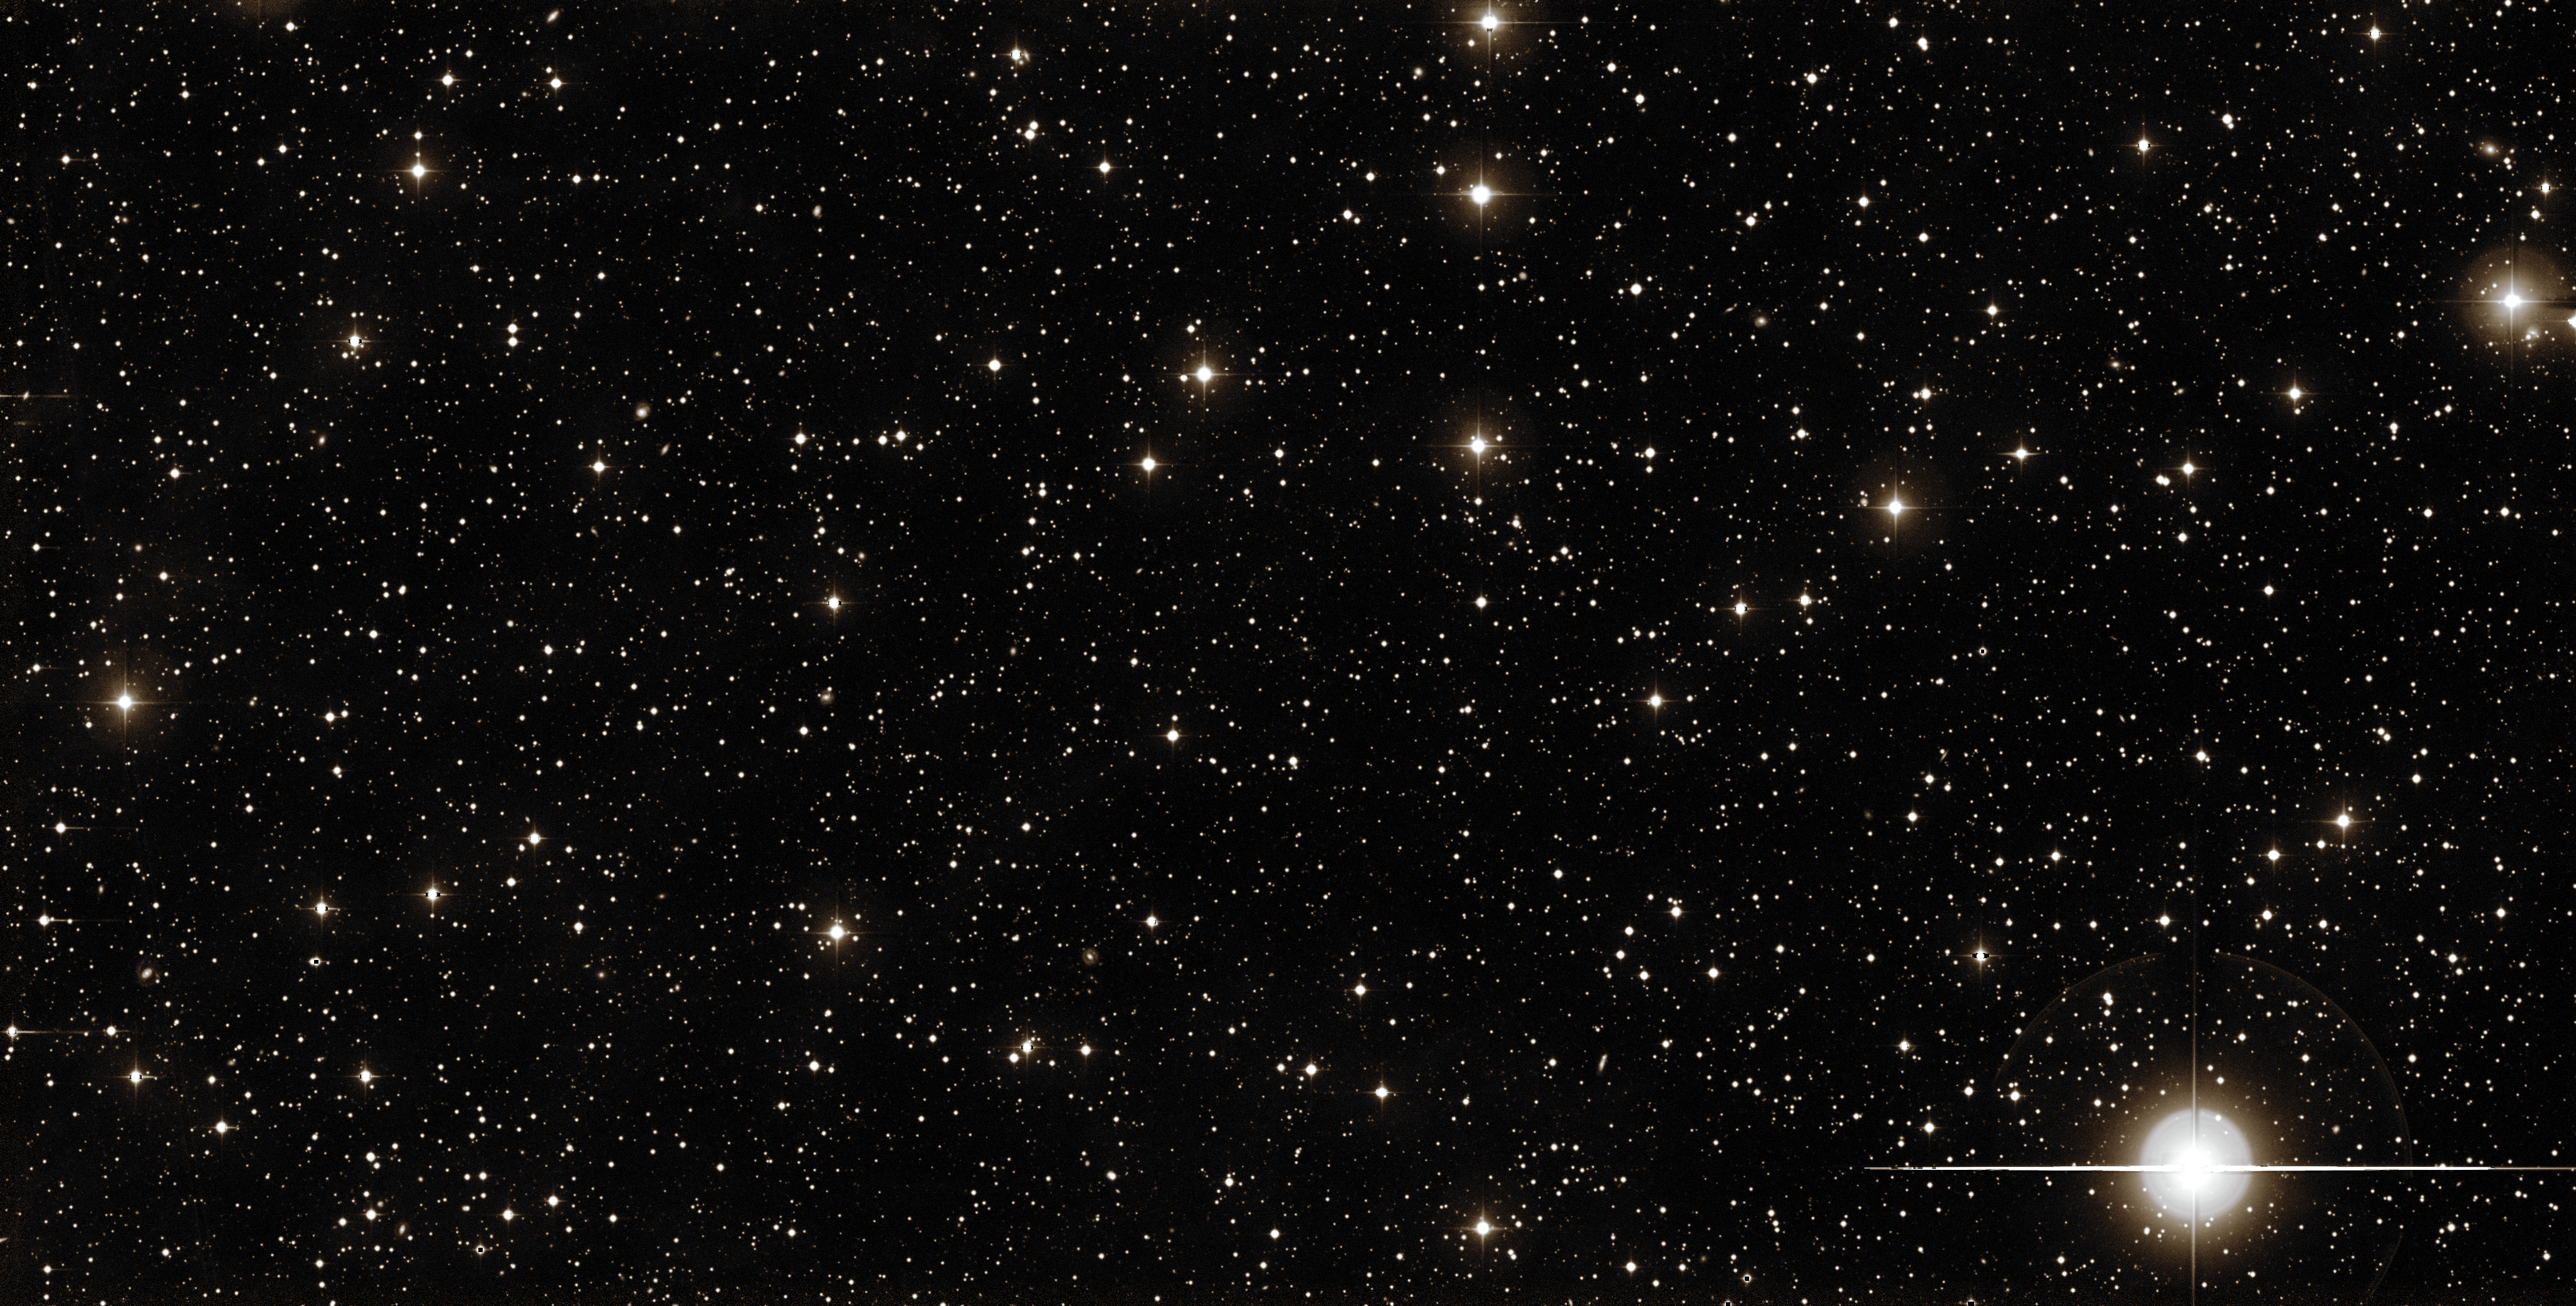

Palomar’s view on iPTF16geu

The Palomar Observatory, located on Palomar Mountain, California, created this wide-field view of the night sky. In the lower central part of the image scientists discovered a supernova explosion, being lensed by a foreground galaxy.

Credit: ESA/Hubble, Palomar Observatory/California Institute of Technology